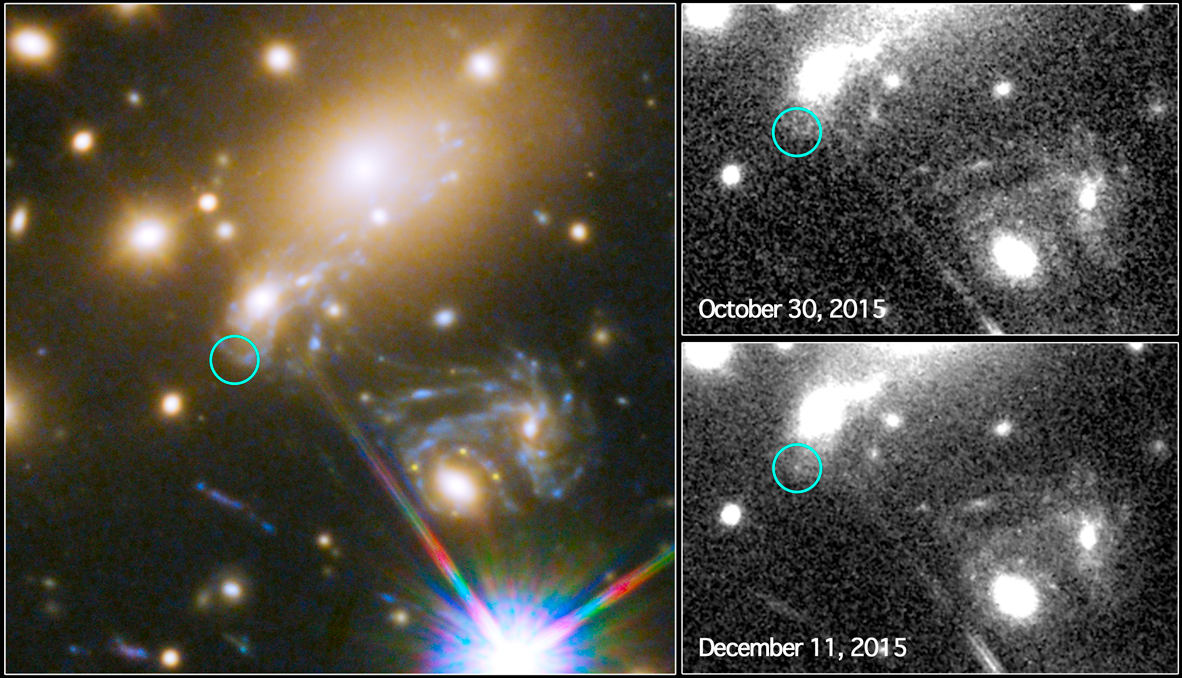

Third appearance of the Refsdal supernova

This image composite shows the search for the supernova, nicknamed Refsdal, using the NASA/ESA Hubble Space Telescope.

The image to the left shows a part of the the deep field observation of the galaxy cluster MACS J1149.5+2223 from the Frontier Fields programme. The circle indicates the predicted position of the newest appearance of the supernova. To the lower right the Einstein cross event from late 2014 is visible.

The image on the top right shows observations by Hubble from October 2015, taken at the beginning of observation programme to detect the newest appearance of the supernova.

The image on the lower right shows the discovery of the Refsdal Supernova on 11 December 2015, as predicted by several different models.

Credit: NASA & ESA and P. Kelly (University of California, Berkeley)